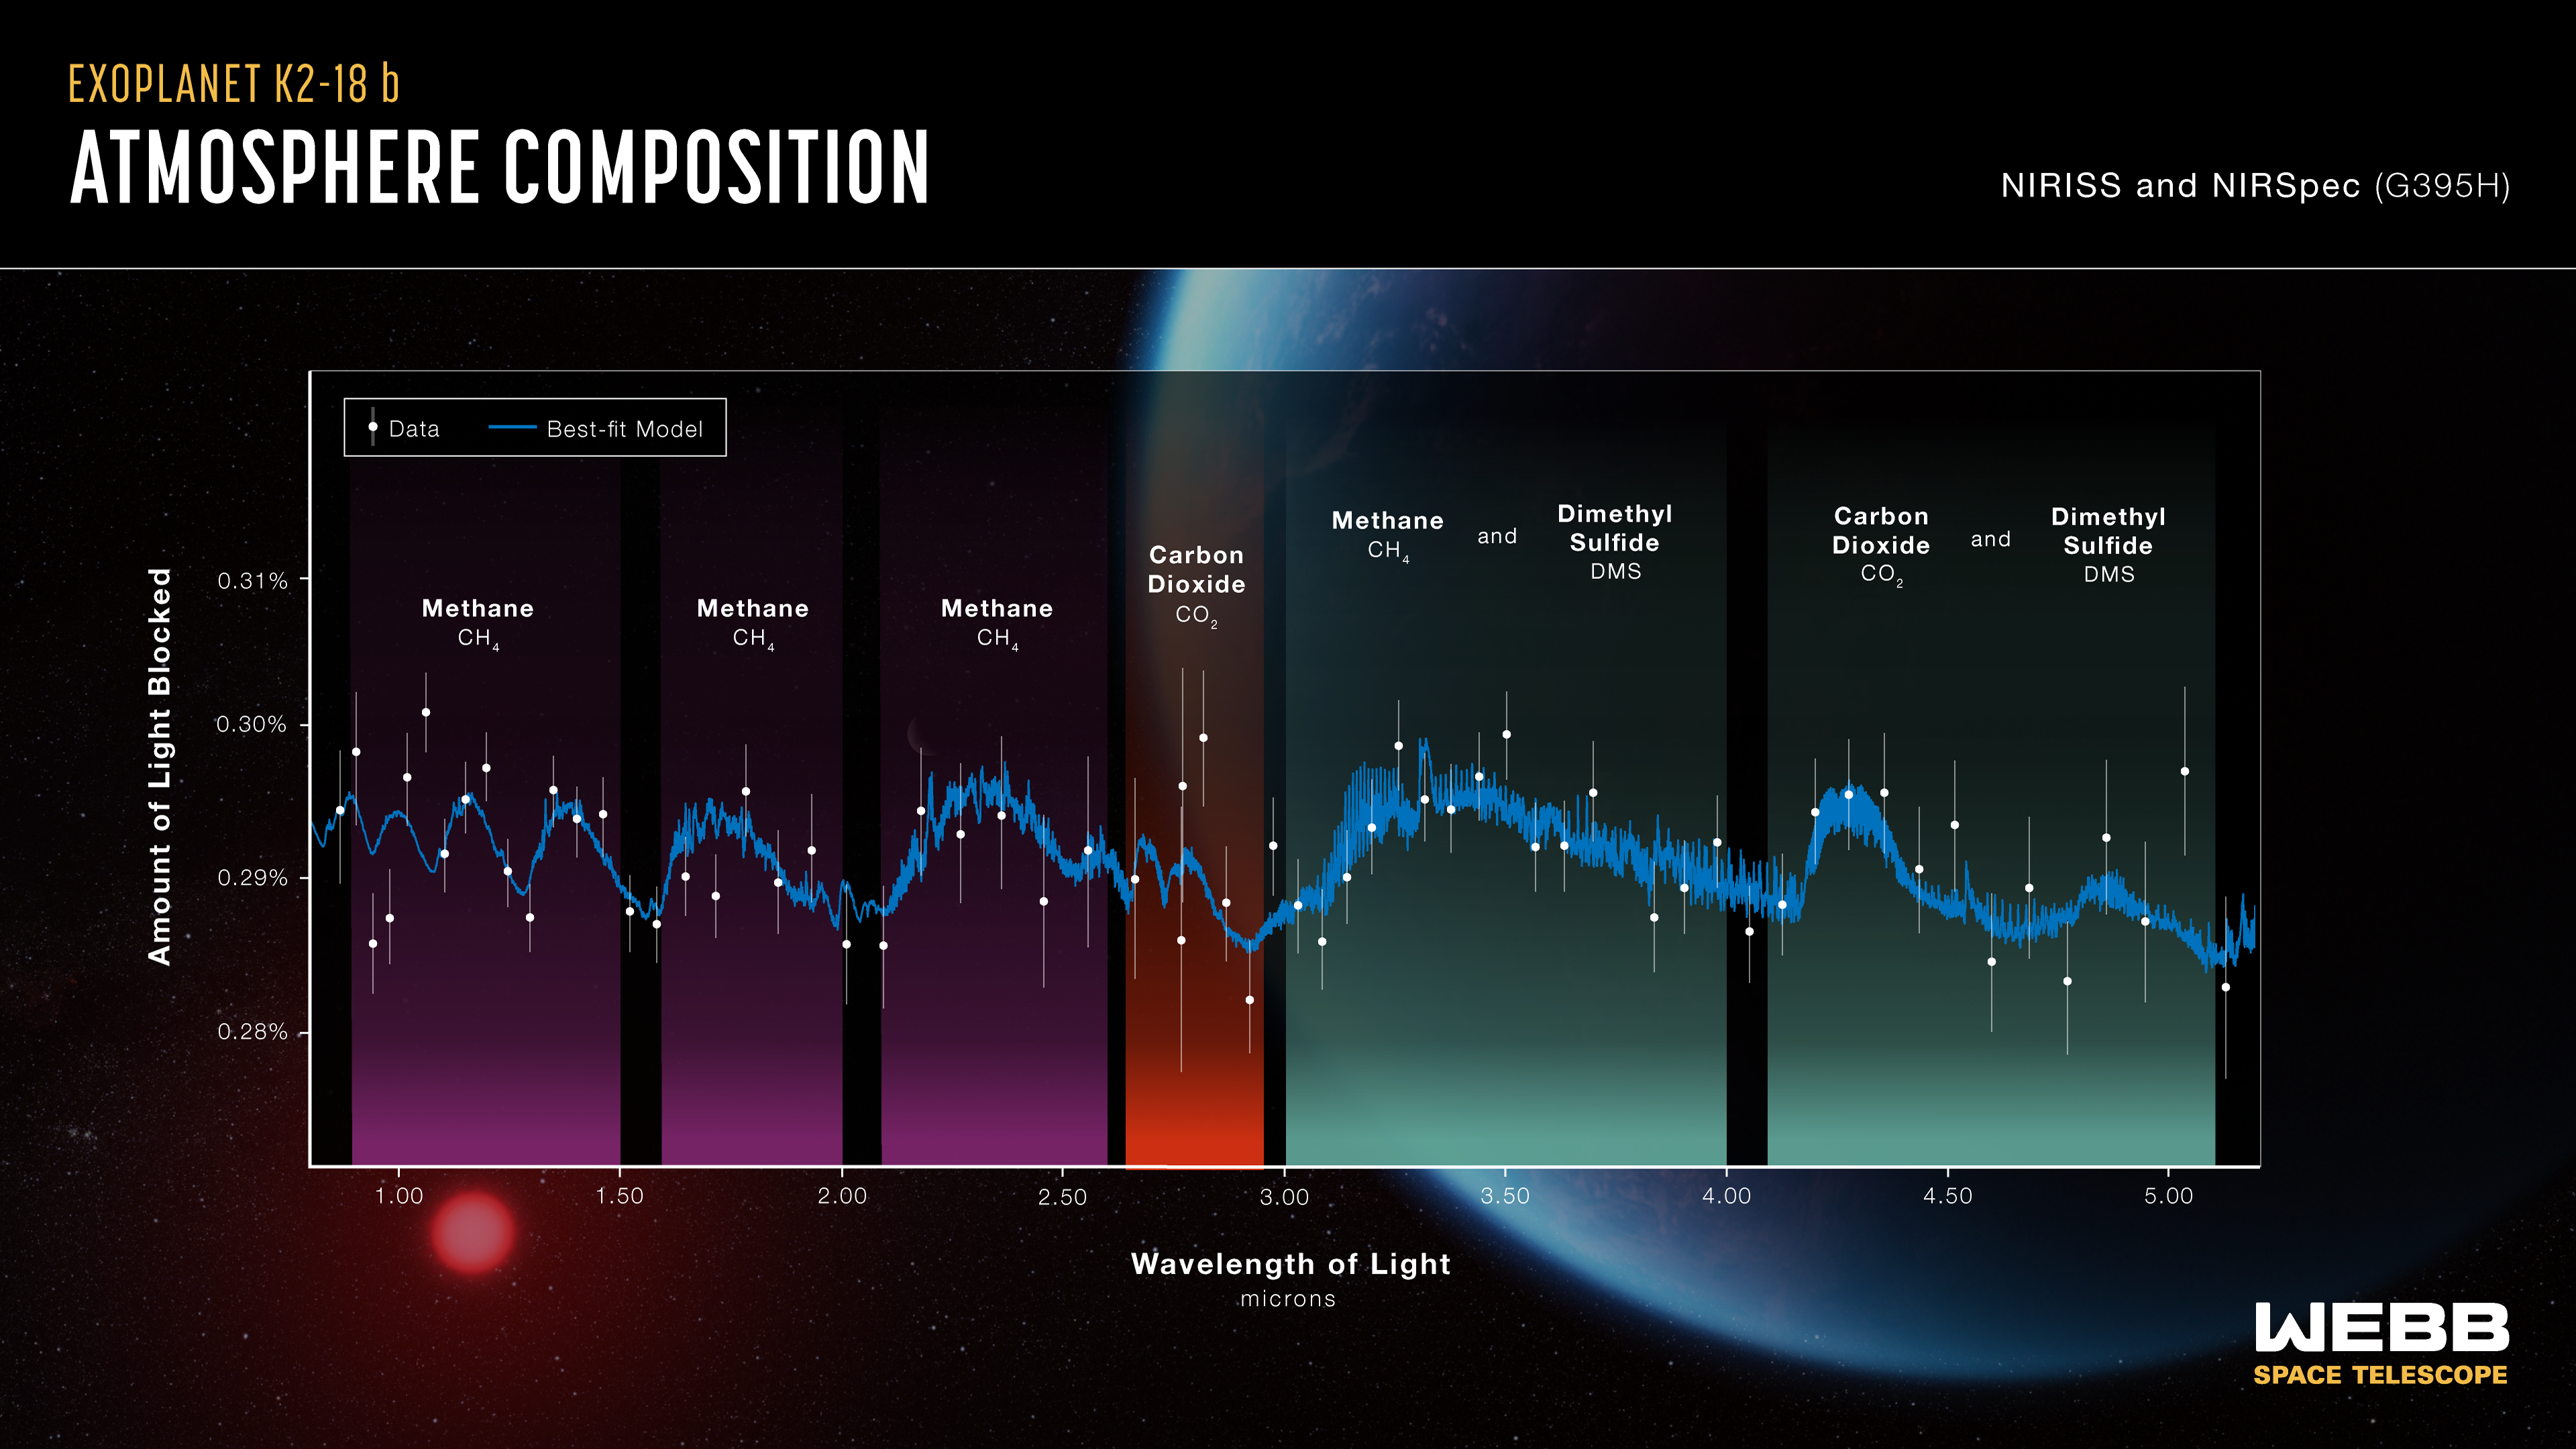

Spectra of exoplanet K2-18 b

Spectrum of K2-18 b, obtained with Webb’s NIRISS (Near-Infrared Imager and Slitless Spectrograph) and NIRSpec (Near-Infrared Spectrograph), displays an abundance of methane and carbon dioxide in the exoplanet’s atmosphere, as well as a possible detection of a molecule called dimethyl sulfide (DMS). The detection of methane and carbon dioxide, and shortage of ammonia, are consistent with the presence of an ocean underneath a hydrogen-rich atmosphere in K2-18 b. K2-18 b, 8.6 times as massive as Earth, orbits the cool dwarf star K2-18 in the habitable zone and lies 120 light-years from Earth.

Credit: NASA, CSA, ESA, J. Olmstead (STScI), N. Madhusudhan (Cambridge University)